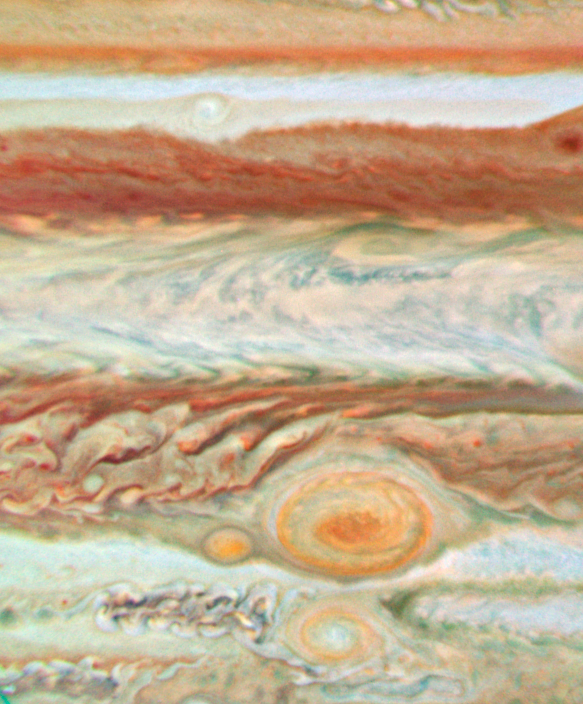

Jupiter - 28 June 2008

28 June 2008

Credit: NASA, ESA and A. Simon-Miller (NASA Goddard Space Flight Center)